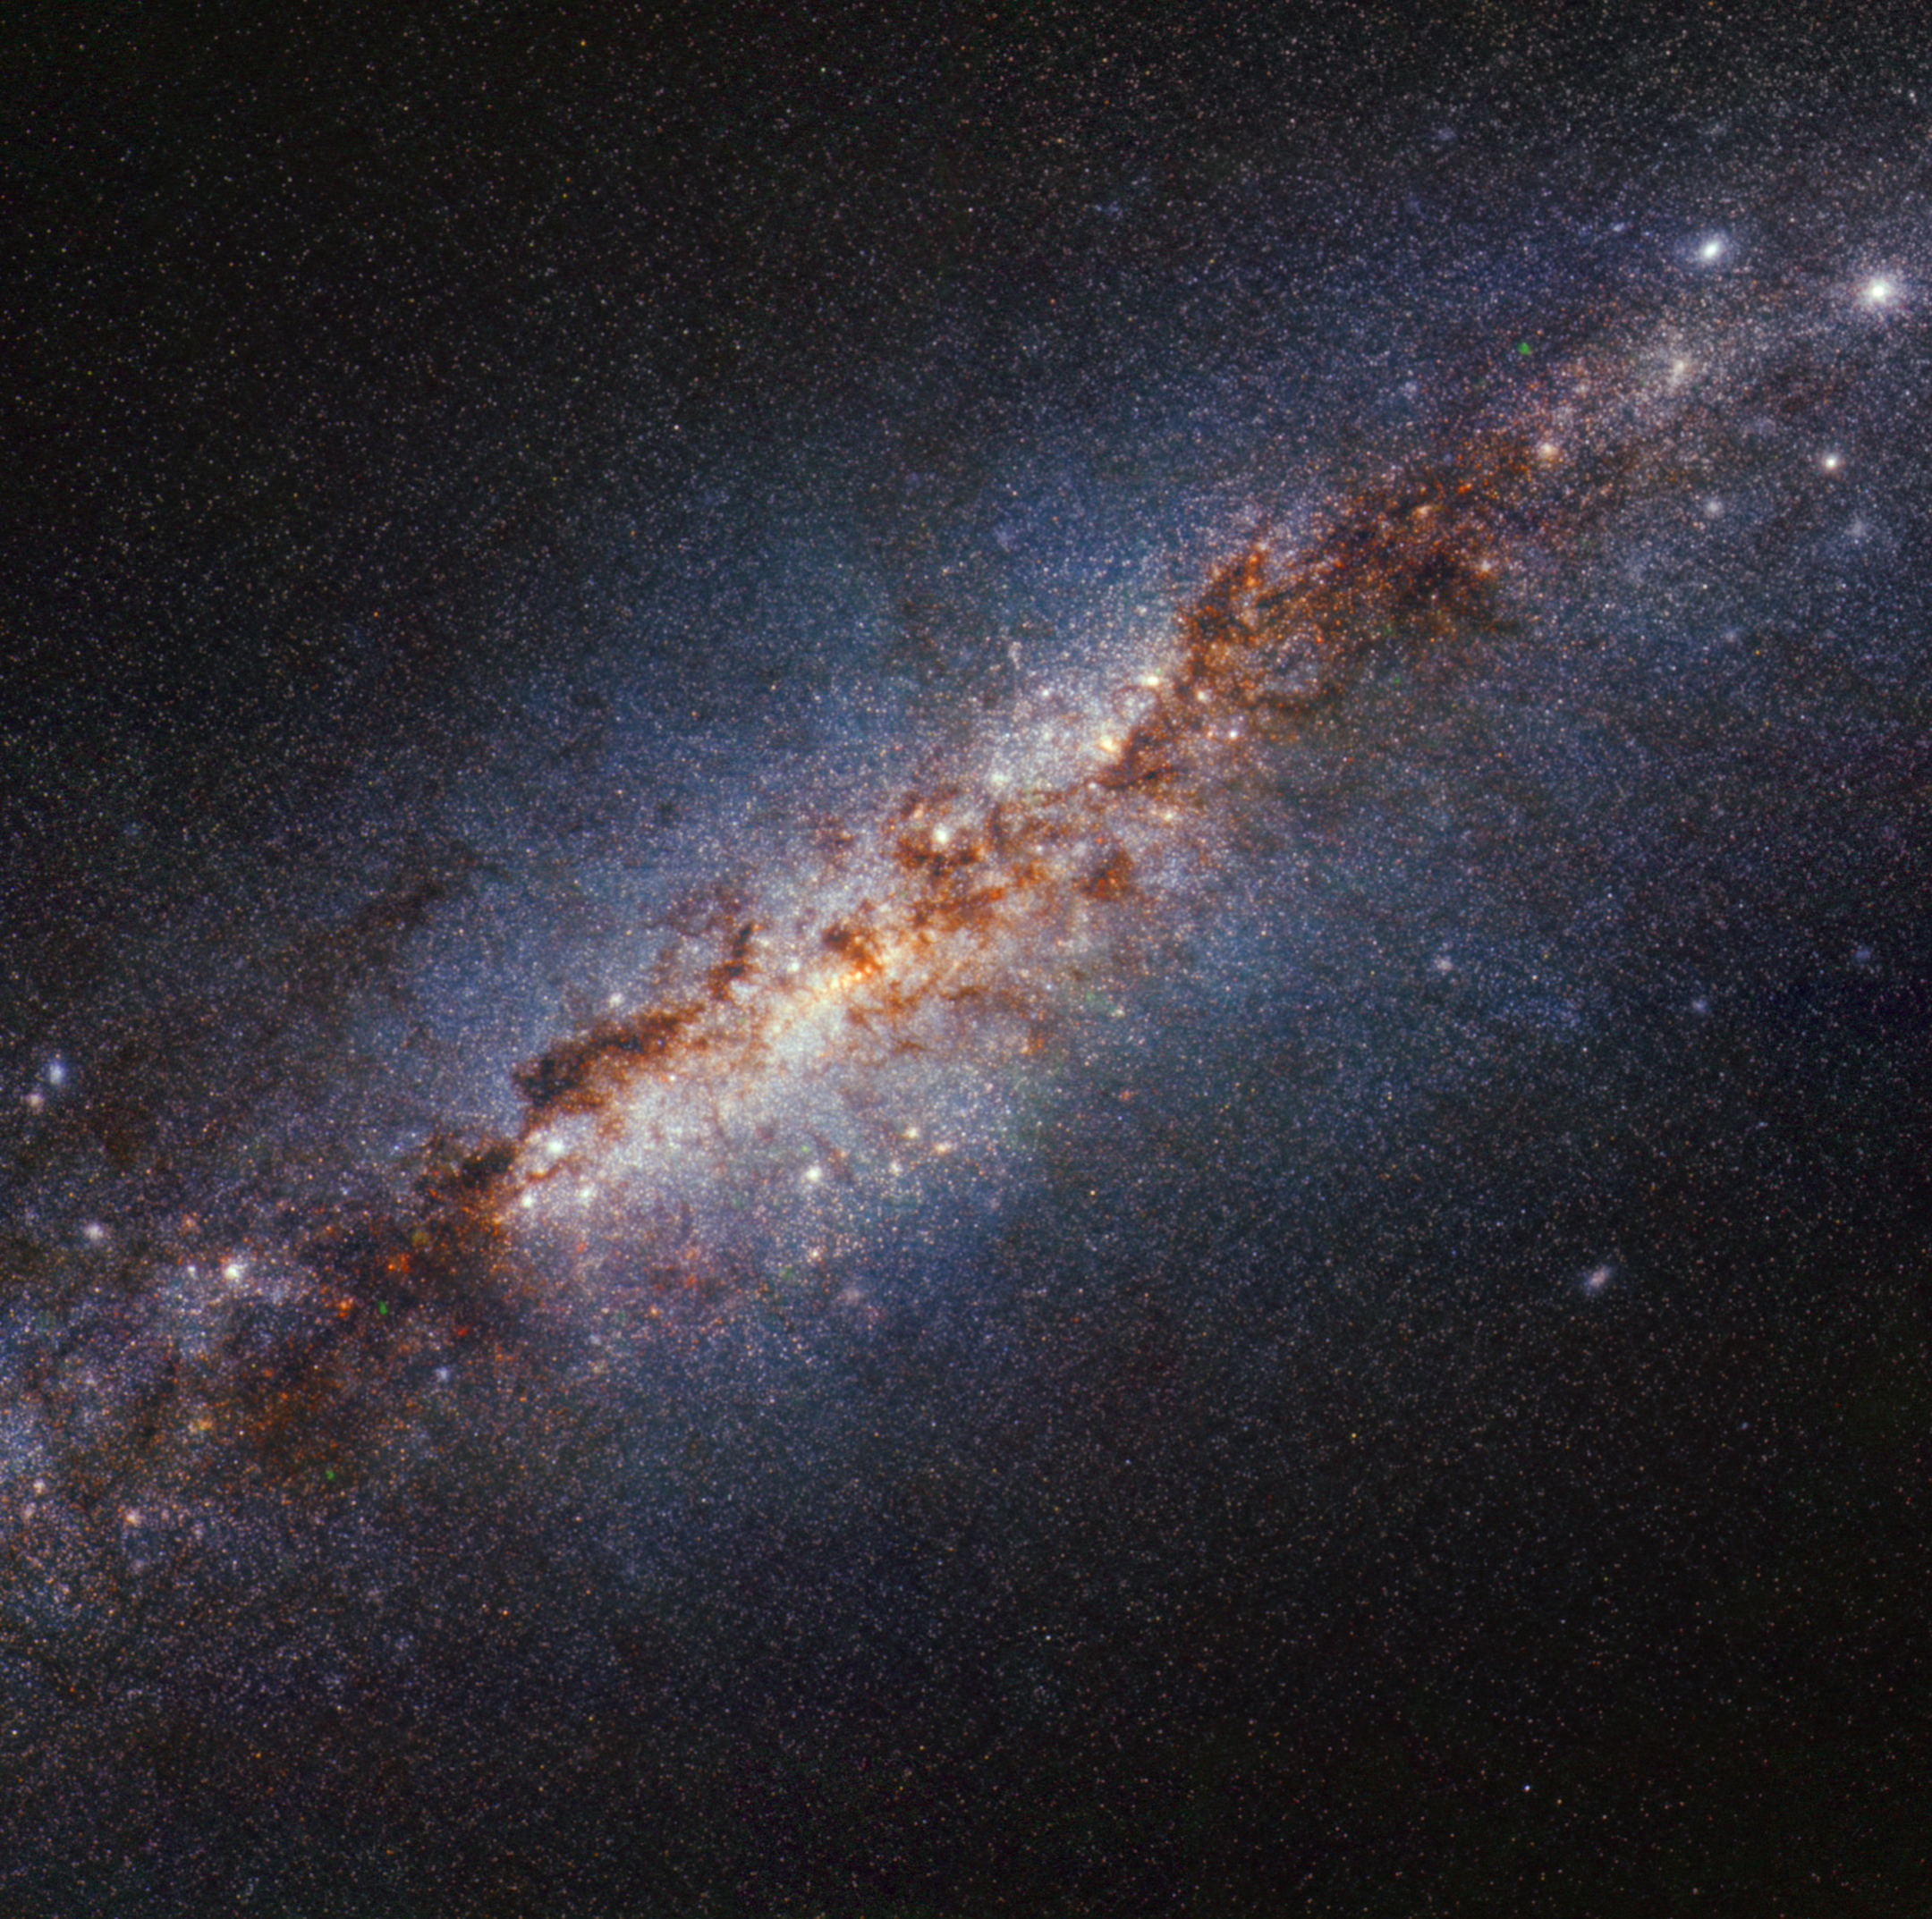

M82 (NIRCam image - shorter wavelengths)

A team of astronomers used the NASA/ESA/CSA James Webb Space Telescope to survey the starburst galaxy Messier 82 (M82), which is located 12 million light-years away in the constellation Ursa Major. M82 hosts a frenzy of star formation, sprouting new stars 10 times faster than the Milky Way galaxy. Webb’s infrared capabilities enabled scientists to peer through curtains of dust and gas that have historically obscured the star formation process.

This image from Webb’s NIRCam (Near-Infrared Camera) instrument shows the centre of M82 with an unprecedented level of detail. With Webb’s resolution, astronomers can distinguish small, bright compact sources that are either individual stars or star clusters. Obtaining an accurate count of the stars and clusters that compose M82’s centre can help astronomers understand the different phases of star formation and the timelines for each stage.

In this image, light at 2.12 microns is coloured red, 1.64 microns is green, and 1.40 microns is blue (filters F212N, 164N, and F140M, respectively).

Credit: NASA, ESA, CSA, STScI, A. Bolatto (UMD)